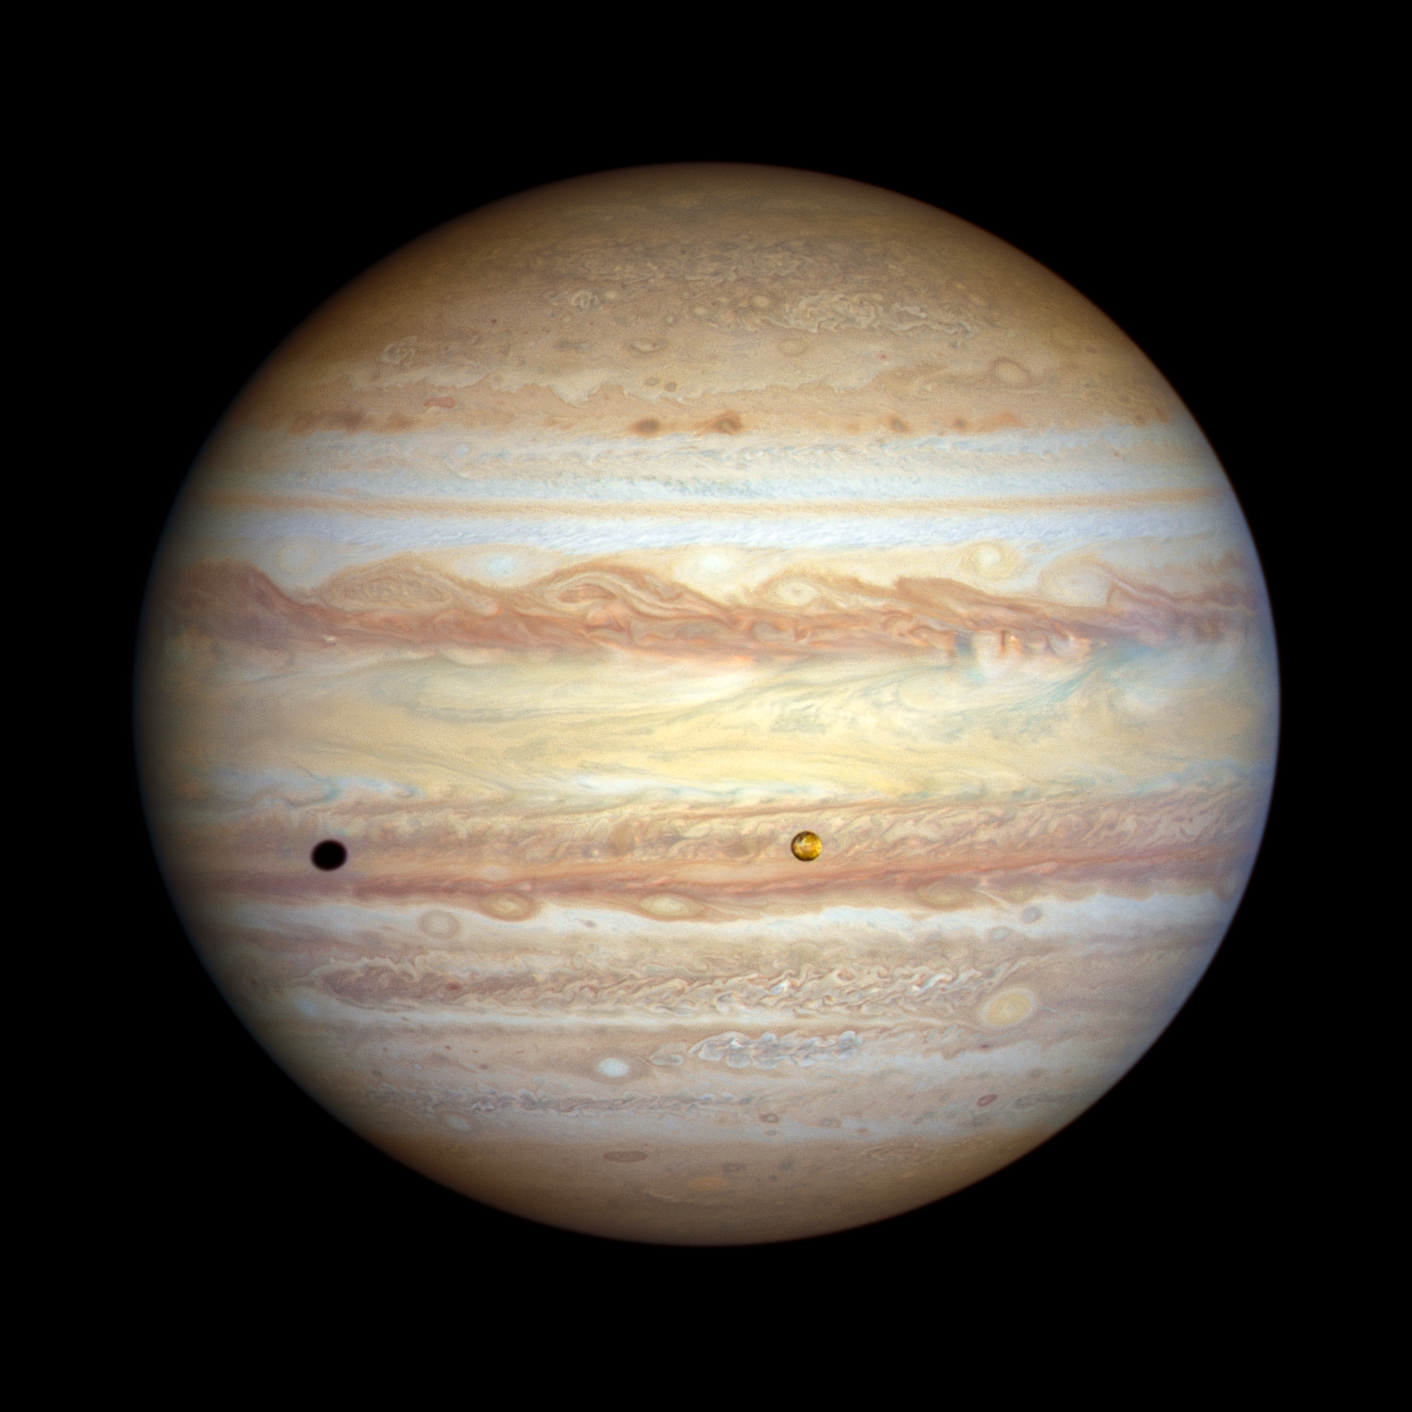

Jupiter (November 2022)

The forecast for Jupiter is for stormy weather at low northern latitudes. A prominent string of alternating storms is visible, forming a ‘vortex street’ as some planetary astronomers call it. This is a wave pattern of nested cyclones and anticyclones, locked together like the alternating gears of a machine moving clockwise and counterclockwise. If the storms get close enough to each other and merge together, they could build an even larger storm, potentially rivalling the current size of the Great Red Spot. The staggered pattern of cyclones and anticyclones prevents individual storms from merging. Activity is also seen interior to these storms; in the 1990s Hubble didn’t see any cyclones or anticyclones with built-in thunderstorms, but these storms have sprung up in the last decade. Strong colour differences indicate that Hubble is seeing different cloud heights and depths as well.

The orange moon Io photobombs this view of Jupiter’s multicoloured cloud tops, casting a shadow toward the planet’s western limb. Hubble’s resolution is so sharp that it can see Io’s mottled-orange appearance, the result of its numerous active volcanoes. These volcanoes were first discovered when the Voyager 1 spacecraft flew by in 1979. The moon’s molten interior is overlaid by a thin crust through which the volcanoes eject material. Sulphur takes on various hues at different temperatures, which is why Io’s surface is so colourful. This photo was taken on 12 November 2022.

Credit: NASA, ESA, STScI, A. Simon (NASA-GSFC), M. H. Wong (UC Berkeley), J. DePasquale (STScI)